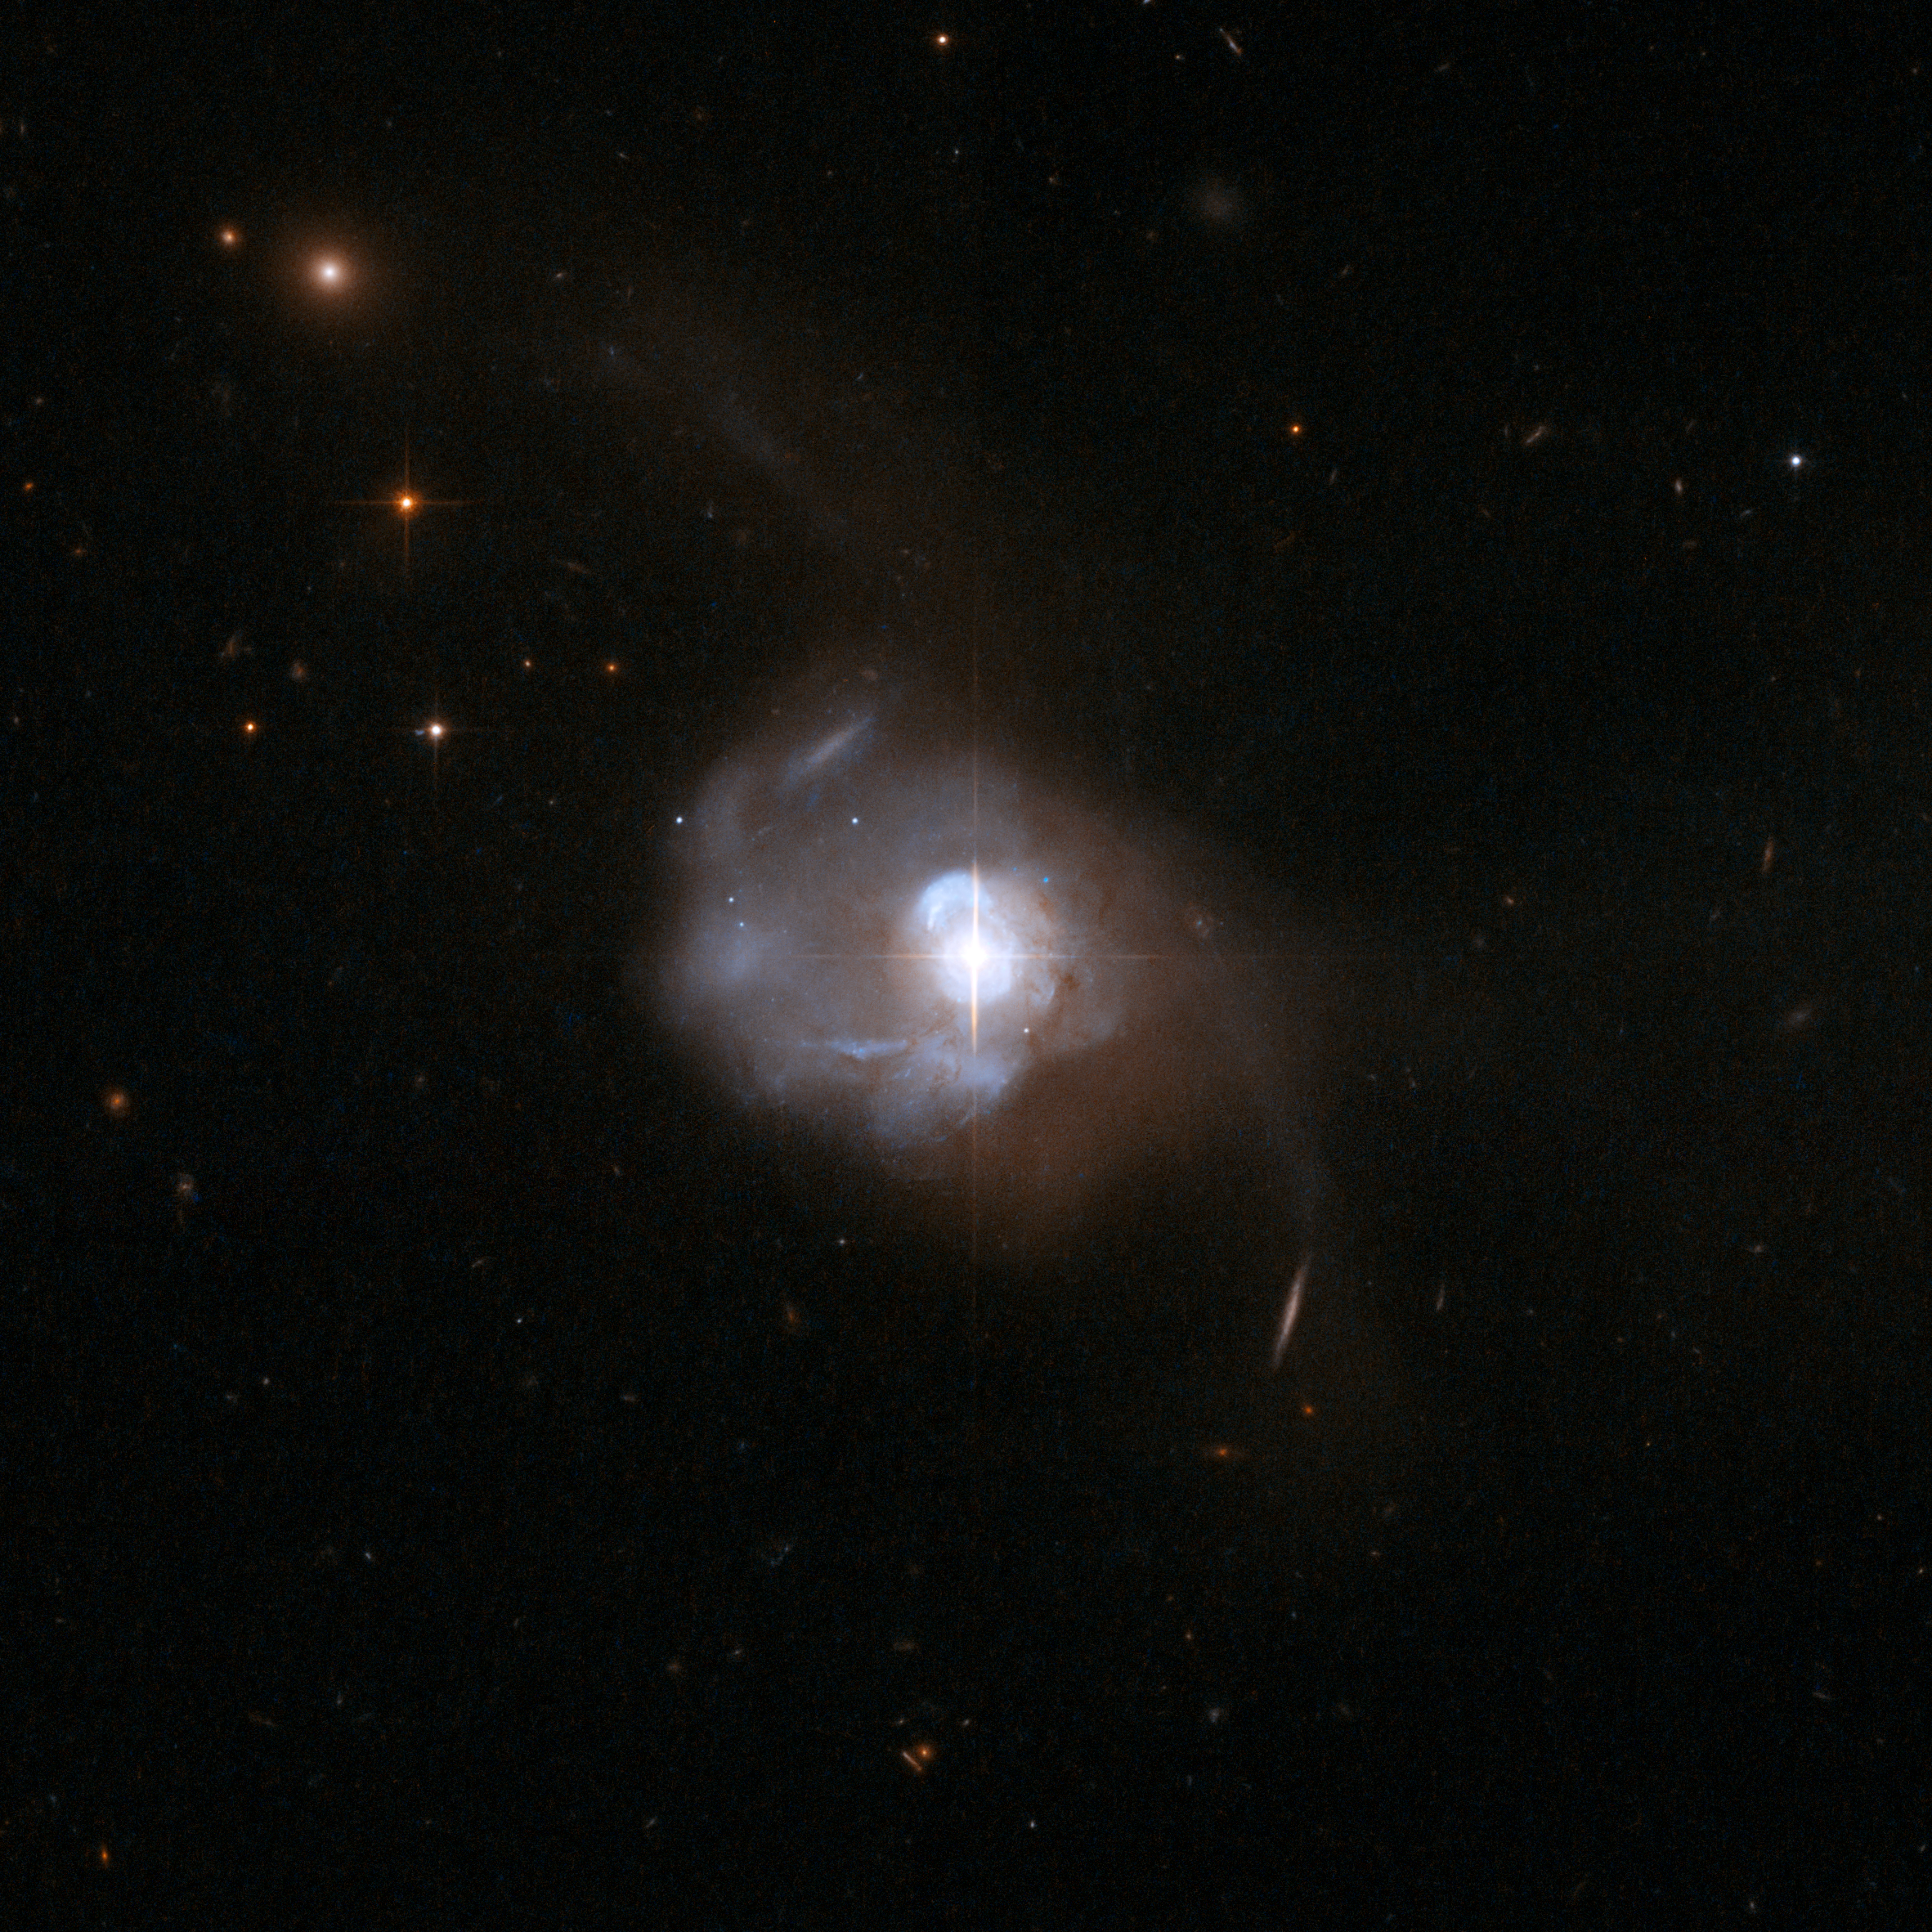

UGC 8058

The extraordinary galaxy Markarian 231 was discovered in 1969 as part of a survey searching for galaxies with strong ultraviolet radiation. It has long tidal tails and a disturbed shape. Results from the first spectrum showed clear signs of the presence of a powerful quasar in the centre that made Markarian 231 unique in the Markarian sample.

Markarian 231 has maintained its reputation as an exceptional object since those early observations and continues to be a favourite target in all wavelength regimes. Its infrared luminosity is similar to that of quasars, making it one of the most luminous and powerful known ultraluminous infrared galaxies. Although the emission of many ultraluminous infrared galaxies appears to be dominated by energetic starbursts, Markarian 231 has been repeatedly identified as an exception and many pieces of evidence point toward an accreting black hole as the major power source behind the enormous infrared luminosity.

Although the primary power source behind the incredible far-infrared luminosity of Markarian 231 is almost certainly an active nucleus, the galaxy is also undergoing an energetic starburst. Most dramatically a nuclear ring of active star formation with a rate estimated to be greater than 100 solar masses per year has been found in the centre.

UGC 8058 is located about 600 million light-years away from Earth.

This image is part of a large collection of 59 images of merging galaxies taken by the Hubble Space Telescope and released on the occasion of its 18th anniversary on 24th April 2008.

Credit: NASA, ESA, the Hubble Heritage Team (STScI/AURA)-ESA/Hubble Collaboration and A. Evans (University of Virginia, Charlottesville/NRAO/Stony Brook University)